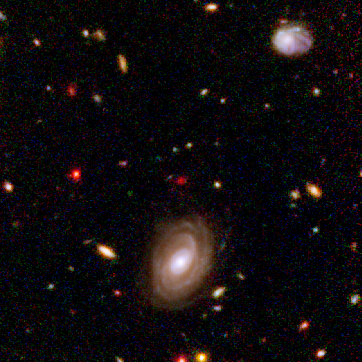

Spitzer and Hubble team up to find "Big Baby" galaxy in the newborn Universe [NICMOS view]

This image demonstrates how data from two space observatories, the Spitzer and Hubble Space Telescopes, are used to identify one of the most distant galaxies ever seen. This galaxy is unusually massive for its youthful age of 800 million years. (After the Big Bang, the Milky Way by comparison, is approximately 13 billion years old.)

The galaxy was detected using Hubble's Near Infrared Camera and Multi-Object Spectrometer (NICMOS). But at near-infrared wavelengths it is very faint and red.

Credit: NASA, ESA, B. Mobasher ( Space Telescope Science Institute and the European Space Agency)